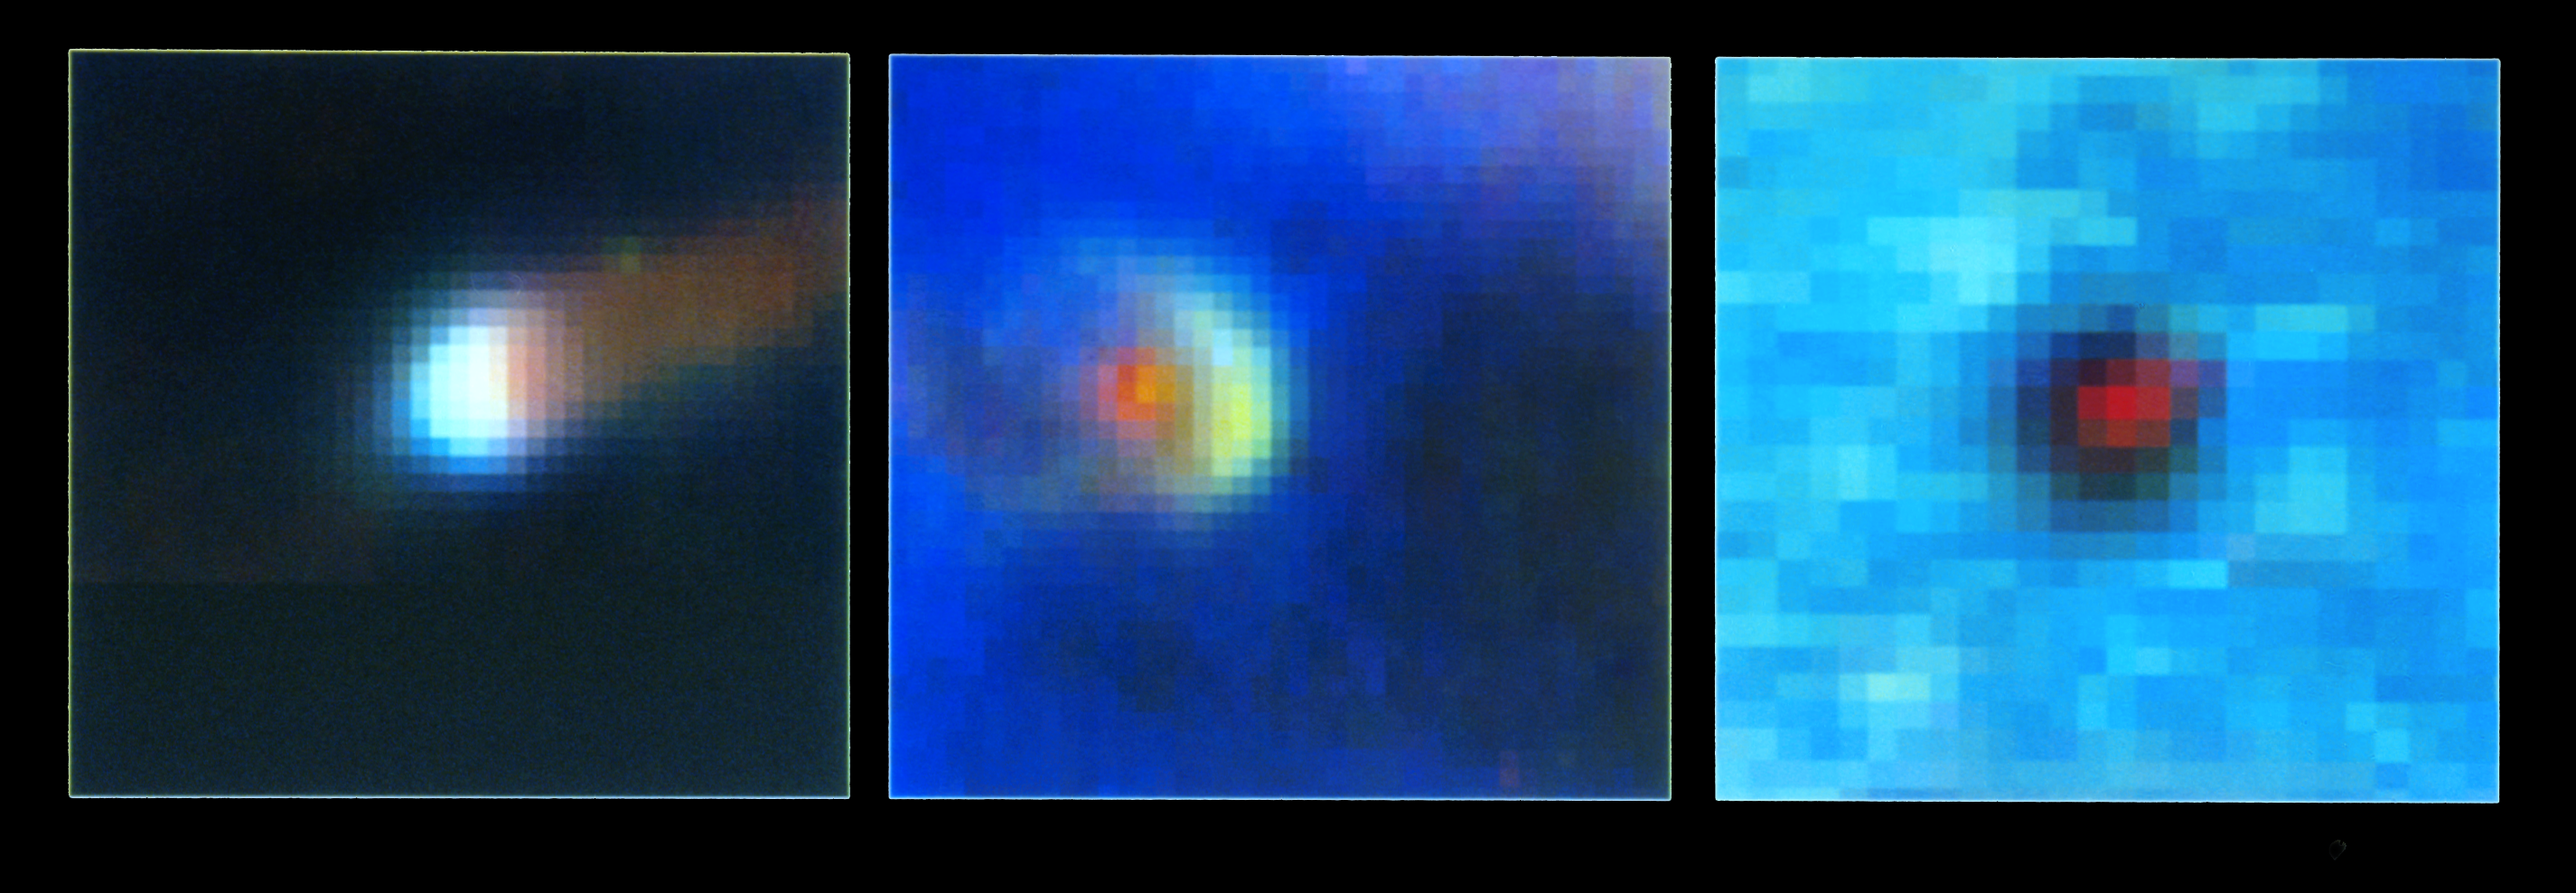

Protoplanetary Disks in the Orion Nebula

A NASA Hubble Space Telescope picture of three protoplanetary disks, called "proplyds" in the Orion Nebula, a star-forming region 1,500 light-years away.

Each proplyd appears as thick disk with a hole in the middle where the cool star is located. Radiation from nearby hot stars "boils off" material from the disk's surface. This material is then blown back into a comet-like tail by a stellar "wind" of radiation and subatomic particles streaming from the hot stars.

This material has only recently become illuminated by the hottest star of the Orion Nebula.

Each picture is only 12.07 light-days across. Each picture element (pixel) is 50 astronomical units, or fifty times the average distance from the Earth to the Sun.

This color photograph is a composite of separate images taken at the wavelengths of the two abundant elements in the nebula: Hydrogen and Oxygen, and the red image was made to isolate the star's image. The images were taken with HST's Wide Field and Planetary Camera (in wide field mode), on August 13 and 14, 1991.

Credit: C.R. O'Dell (Rice University), and NASA